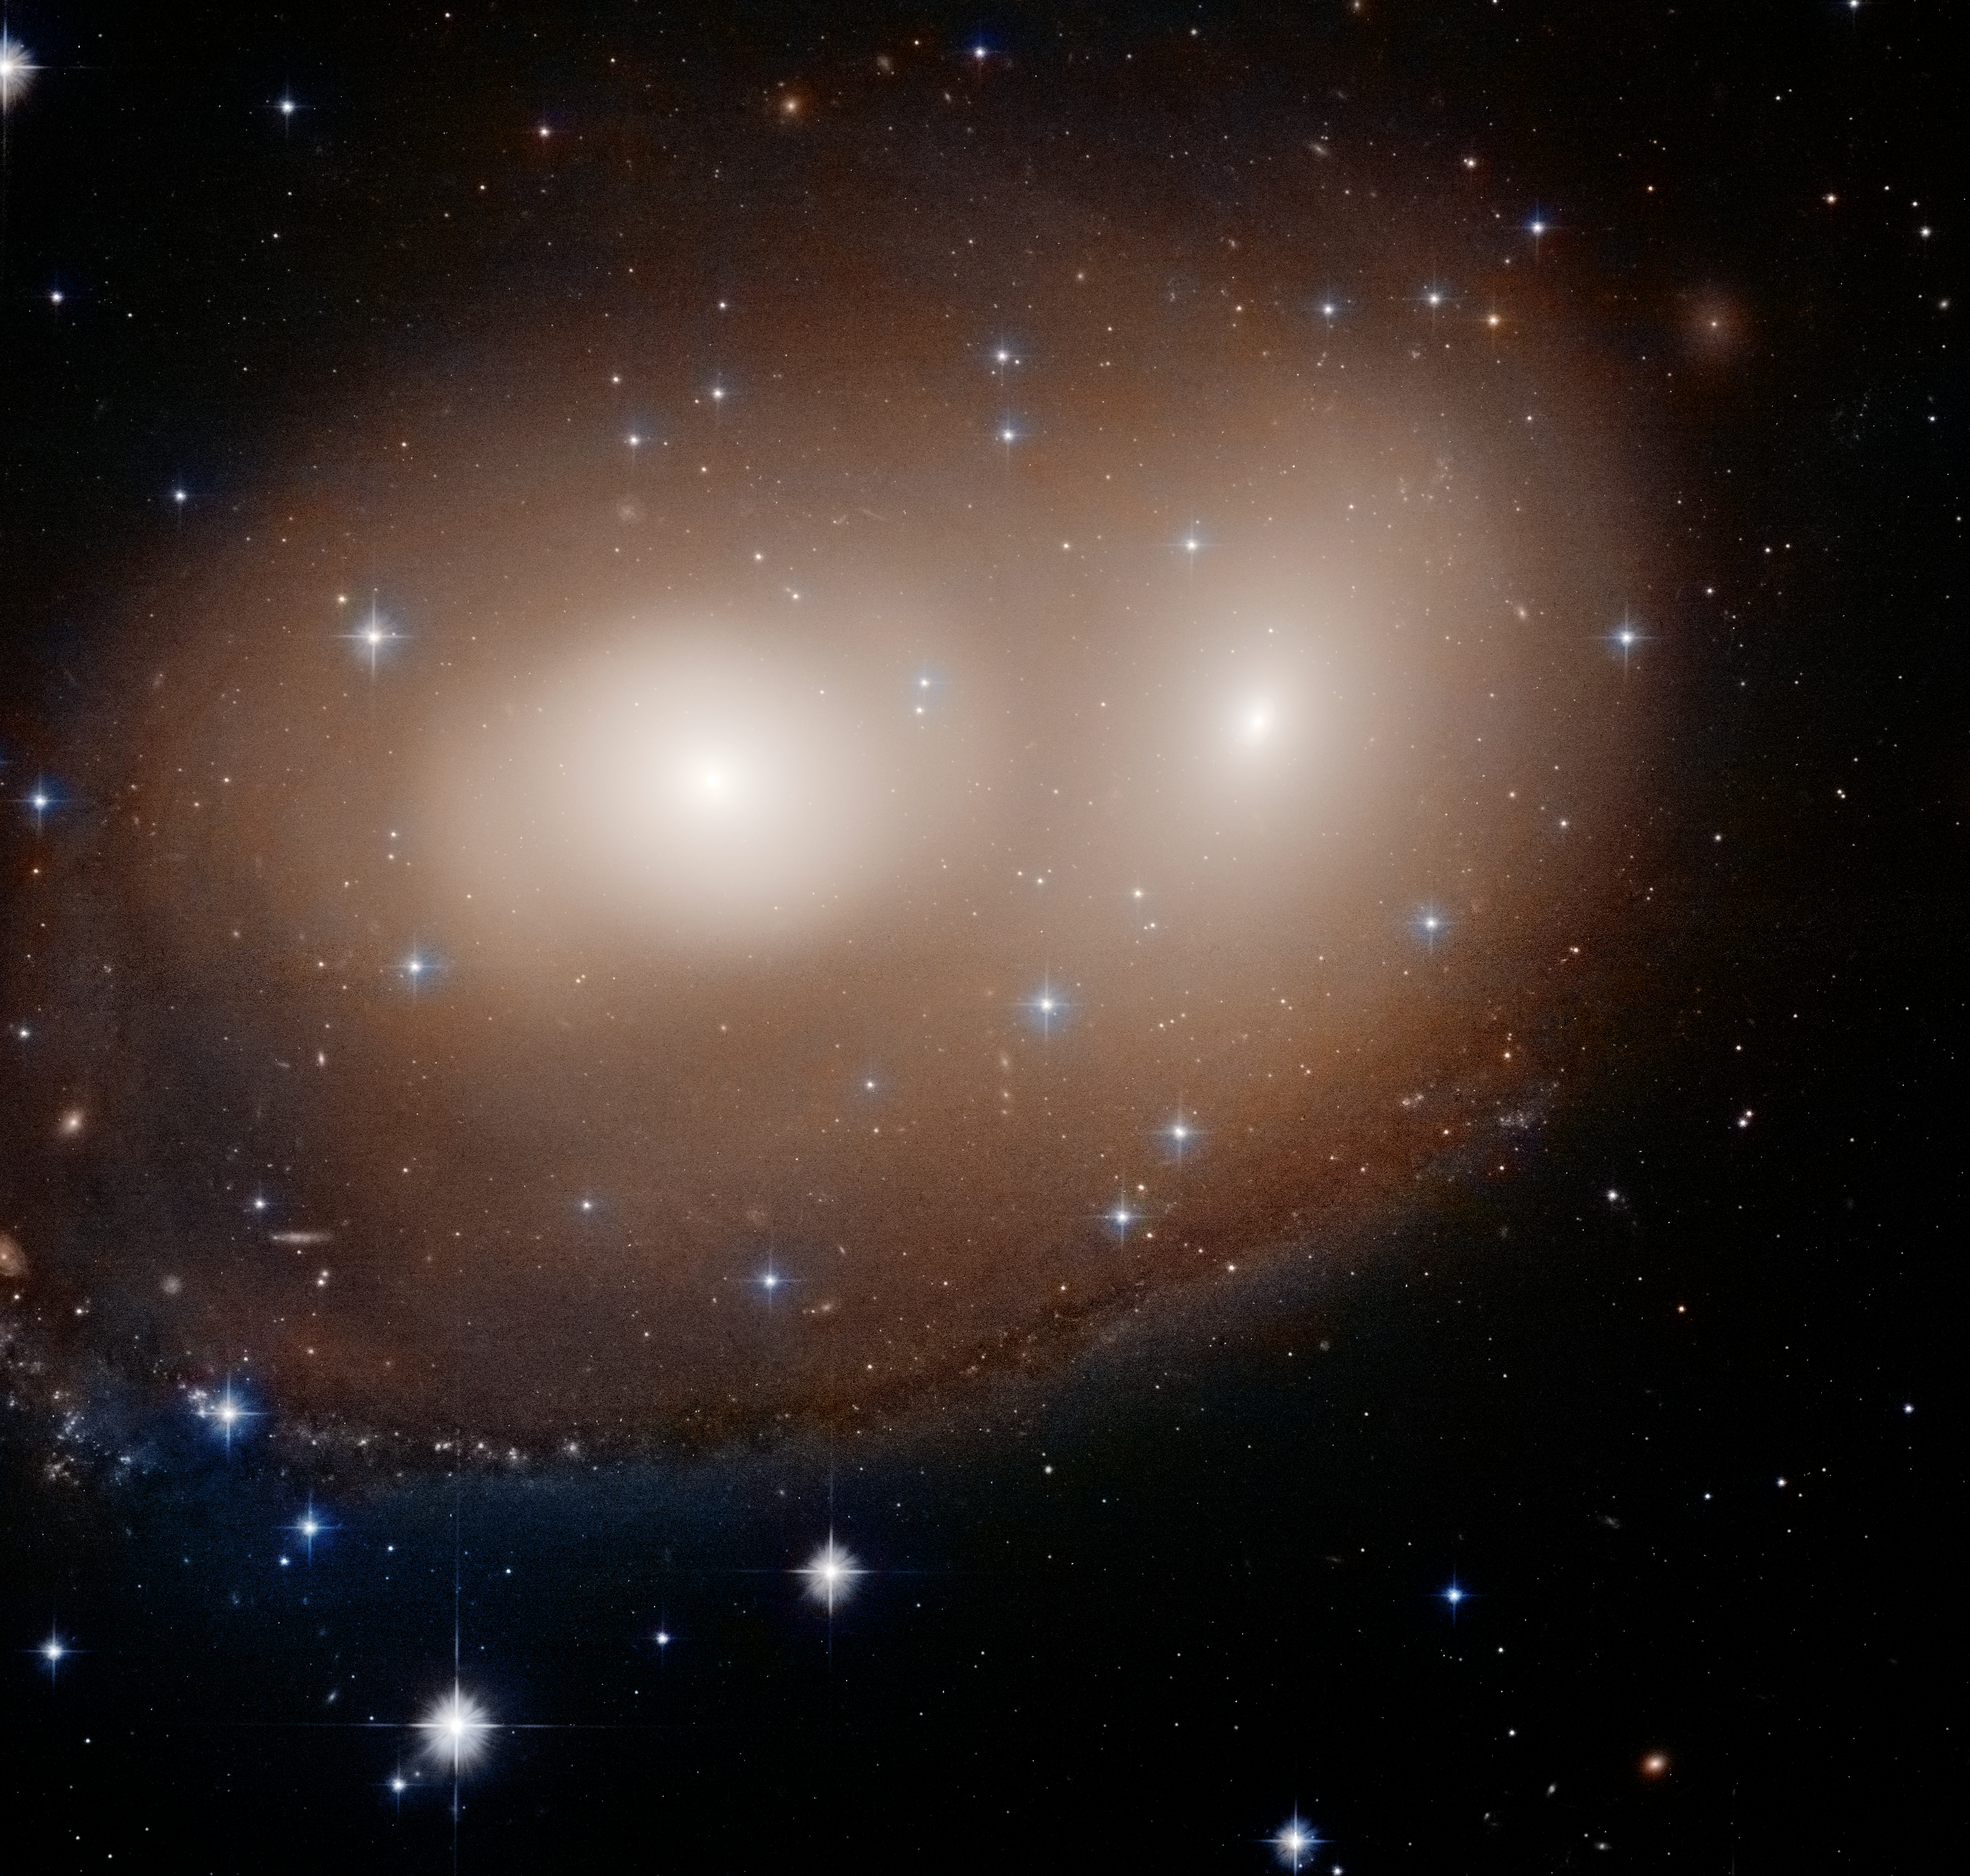

Hubble Finds Halloween Pumpkin Pair

What looks like two glowing eyes and a crooked carved smile in this new NASA/ESA Hubble Space Telescope snapshot is the early stages of a collision between two galaxies. Residing in the constellation Canis Major, the entire view is 109,000 light-years across, approximately the diameter of our Milky Way.

The overall pumpkin-ish color corresponds to the glow of aging red stars in two galaxies, cataloged as NGC 2292 and NGC 2293, which only have a hint of spiral structure.

The ghostly arm making the “smile” may be just the beginning of the process of rebuilding a spiral galaxy, say researchers. The arm embraces both galaxies. It most likely formed when interstellar gas was compressed as the two galaxies began to merge. The higher density precipitates new star formation.

Credit: NASA, ESA, and W. Keel (University of Alabama)